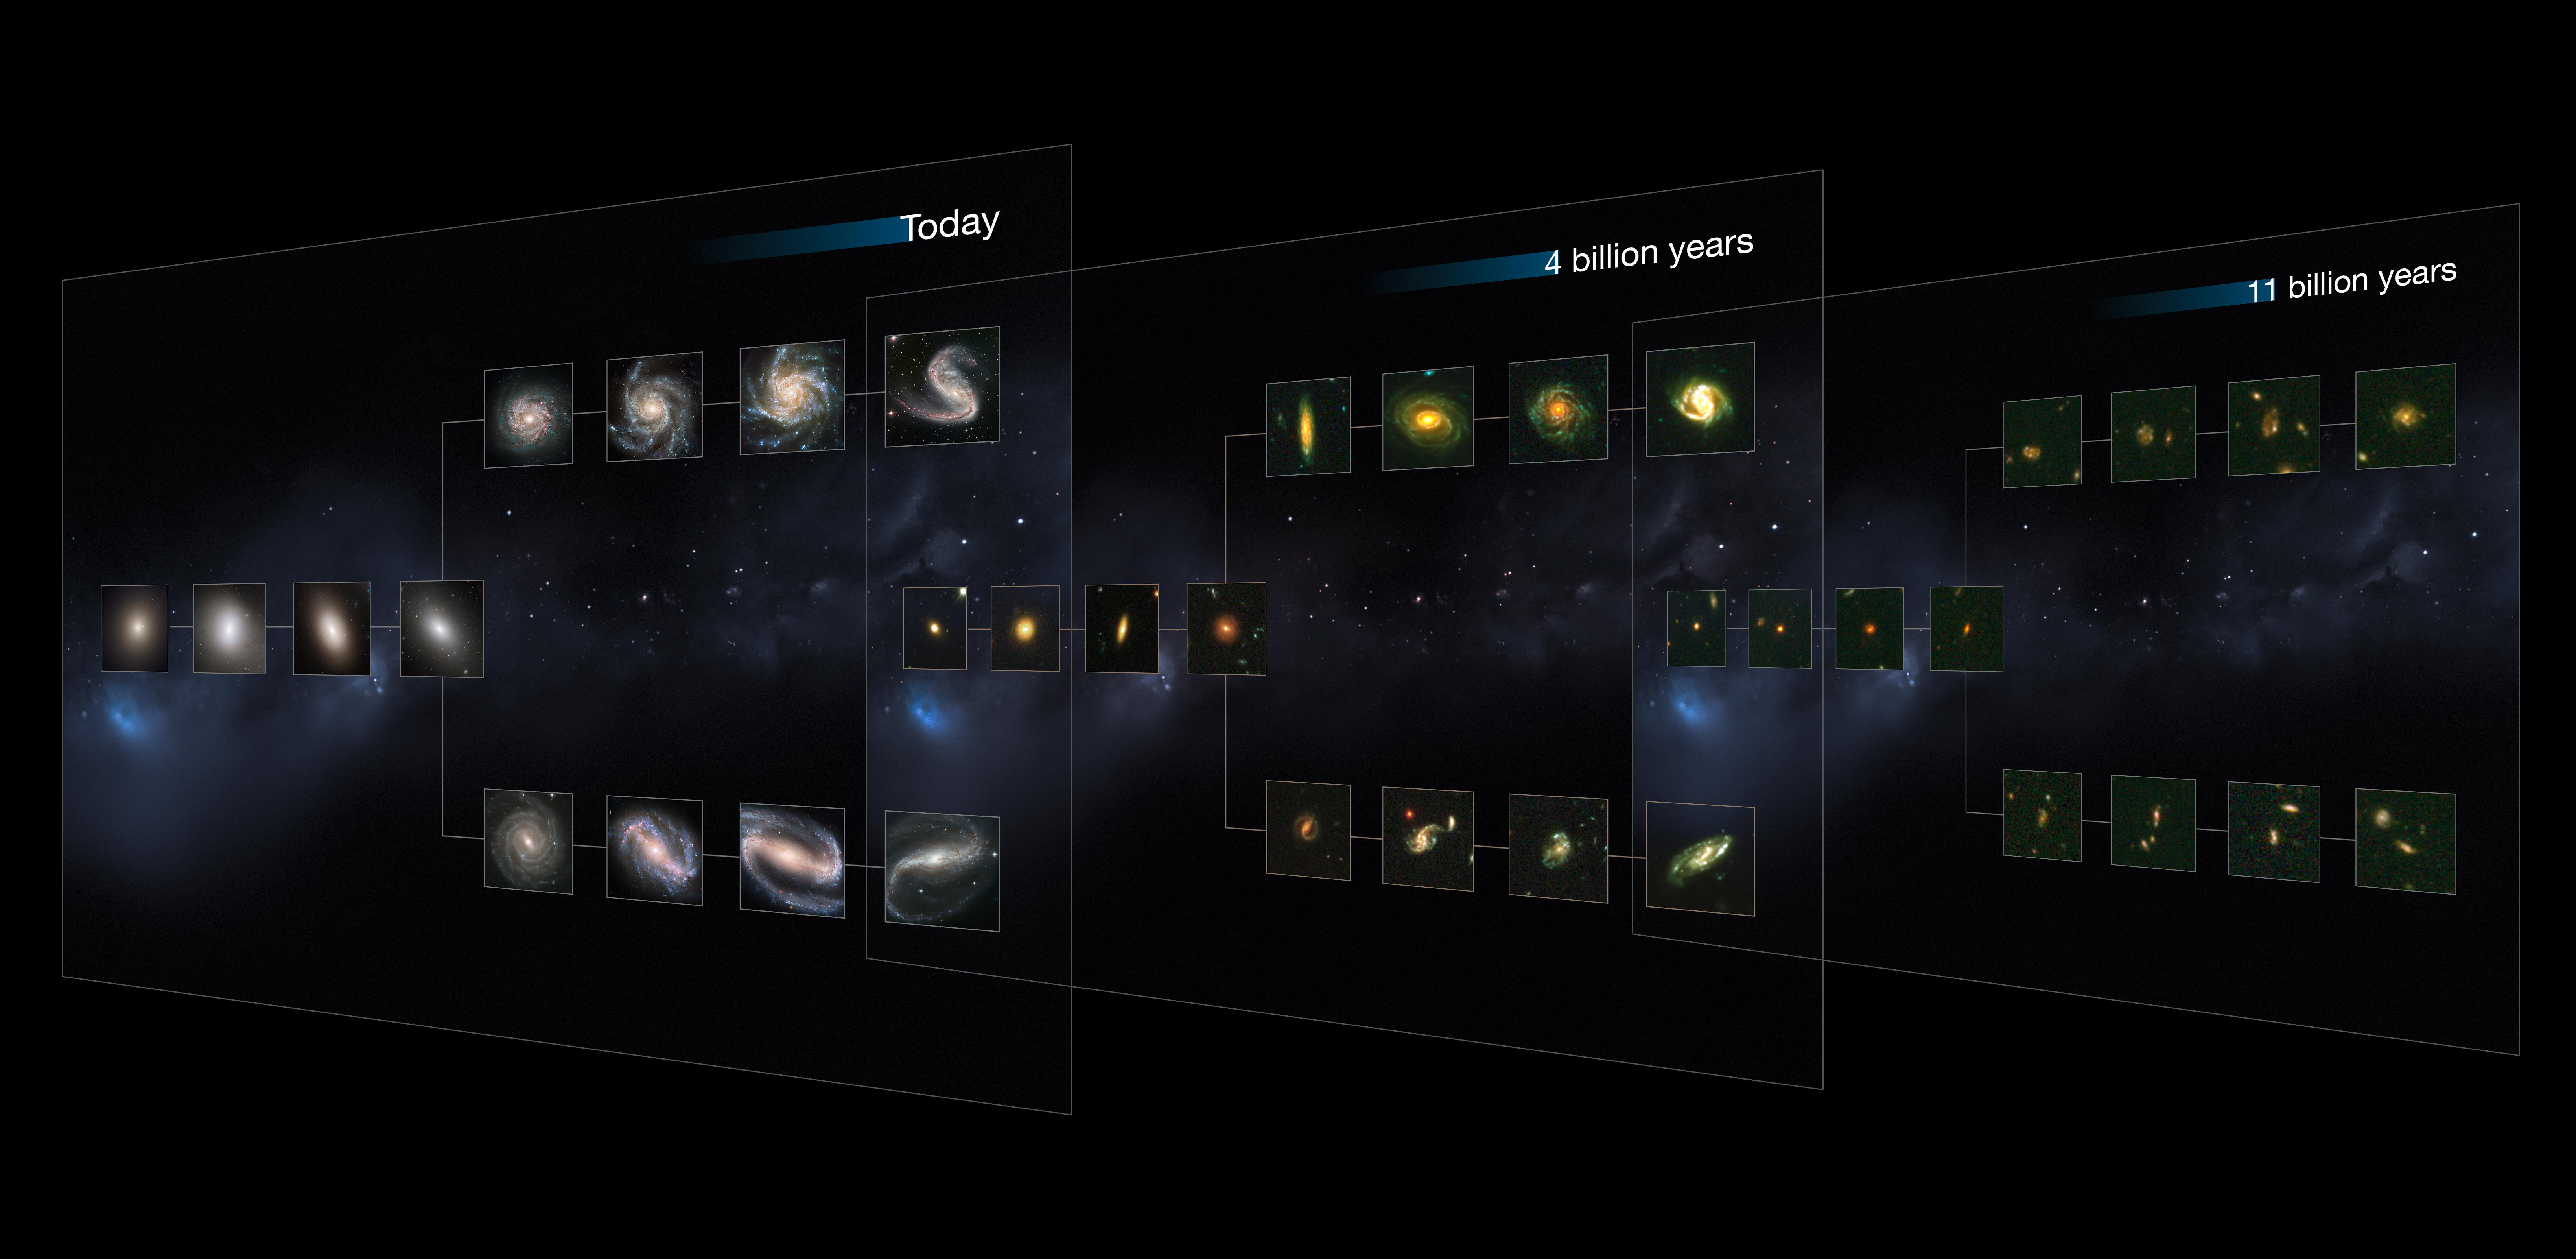

CANDELS galaxies reveal the Hubble Sequence throughout the Universe's history

The previous release images were illustrative, designed to show how different galaxy types change as we go back in time. This image has been added to show several of the actual galaxies that were observed during Hubble's CANDELS survey, and used as part of this study.

This image shows "slices" of the Universe at different times throughout its history (present day, and at 4 and 11 billion years ago). Each slice goes further back in time, showing how galaxies of each type appear. The shape is that of the Hubble tuning fork diagram, which describes and separates galaxies according to their morphology into spiral (S), elliptical (E), and lenticular (S0) galaxies. On the left of this diagram are the ellipticals, with lenticulars in the middle, and the spirals branching out on the right side. The spirals on the bottom branch have bars cutting through their centres.

The galaxies in the "4 billion years" and "11 billion years" slides are all taken from CANDELS data. The present-day Universe shows big, fully formed and intricate galaxy shapes. As we go further back in time, they become smaller and less mature, as these galaxies are still in the process of forming. As far back as 11 billion years, it becomes difficult to distinguish between the different types visually, but this new study has found the sequence to be in place at these times.

Credit: NASA, ESA, M. Kornmesser; the CANDELS team (H. Ferguson)